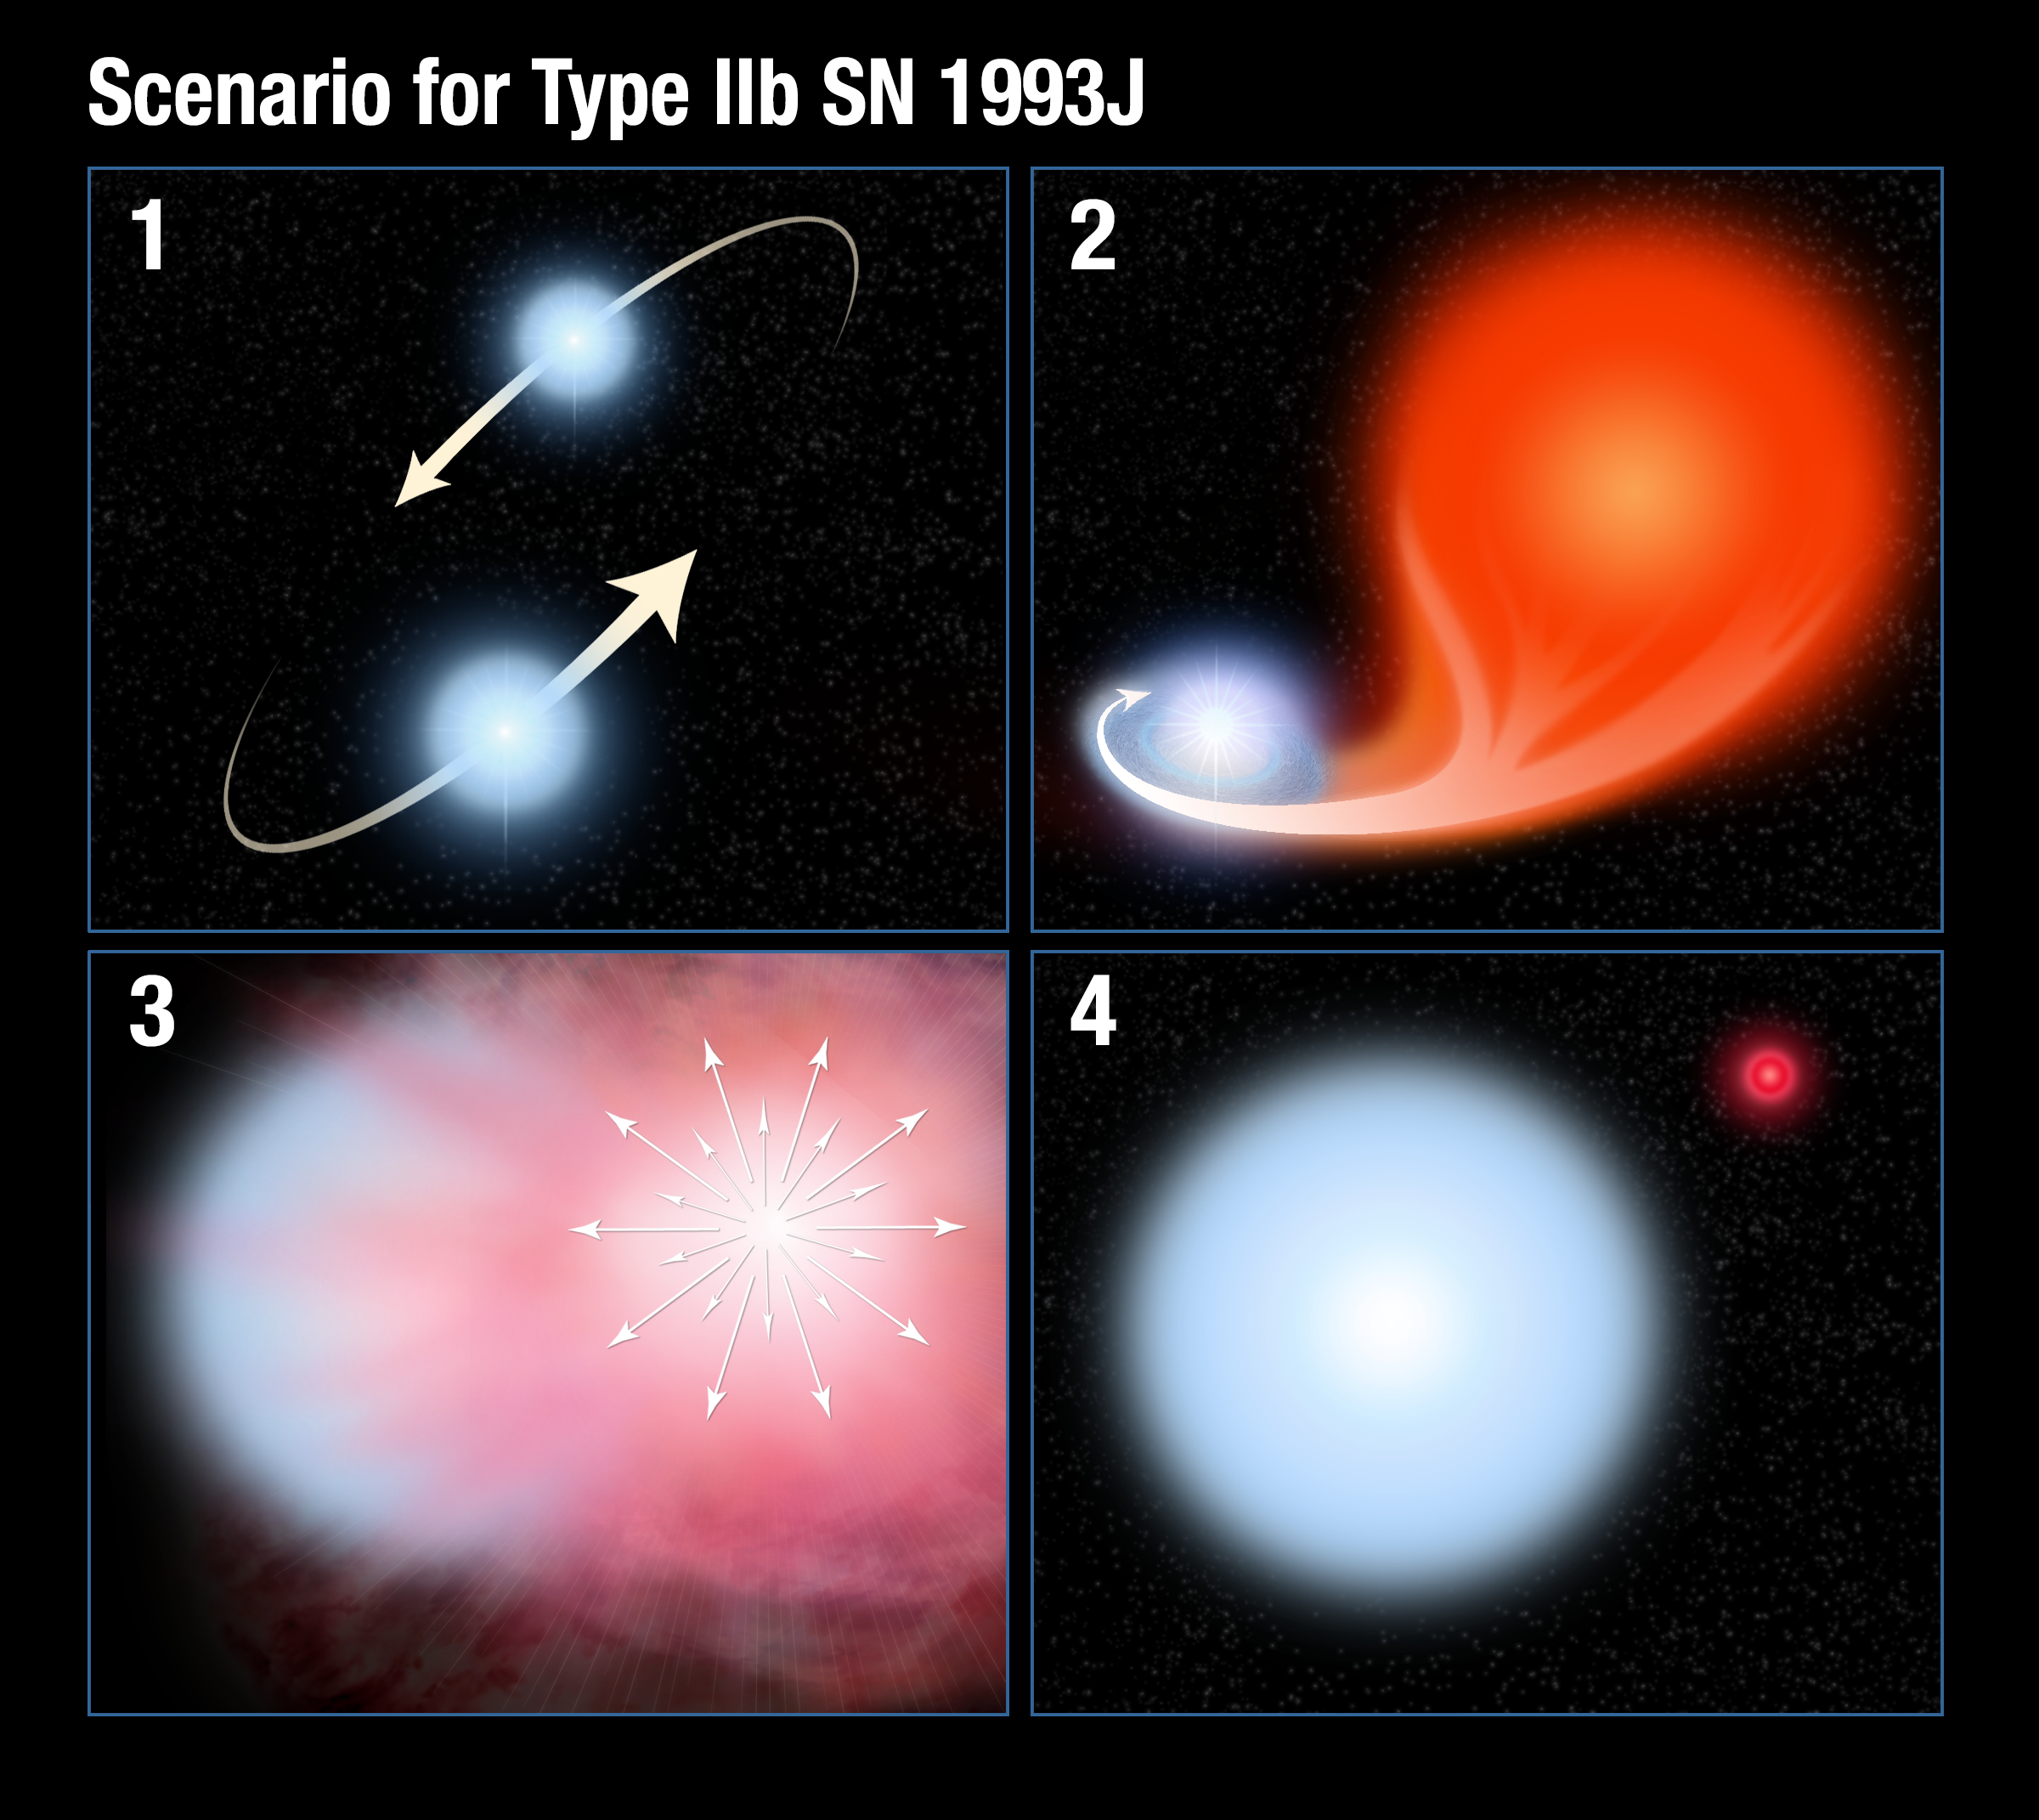

Scenario for Type IIb supernova 1993J

This illustration shows the key steps in the evolution of a Type IIb supernova.

Panel 1: Two very hot stars orbit about each other in a binary system.

Panel 2: The slightly more massive member of the pair evolves into a bloated red giant and spills the hydrogen in its outer envelope onto the companion star.

Panel 3: The more massive star explodes as a supernova.

Panel 4: The companion star survives the explosion. Because it has locked up most of the hydrogen in the system, it is a larger and hotter star than when it was born. The fireball of the supernova fades.

Credit: NASA, ESA, and A. Feild (STScI)